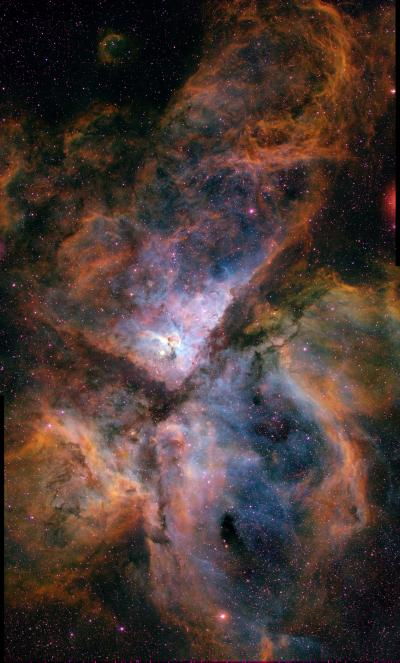

Ground-Based Image of Carina Nebula (NGC 3372)

This image shows the Carina Nebula (NGC 3372), combining the light from 3 different filters tracing emission from oxygen (blue), hydrogen (green), and sulfur (red). The colour is also representative of the temperature in the ionized gas: blue is relatively hot and red is cooler. This image was taken at the Curtis Schmidt telescope at the Cerro Tololo Interamerican Observatory.

Visit the NOAO image gallery for more file formats (http://www.noao.edu/image_gallery/html/im0667.html).

Credit: N. Smith, University of Minnesota/NOAO/AURA/NSF